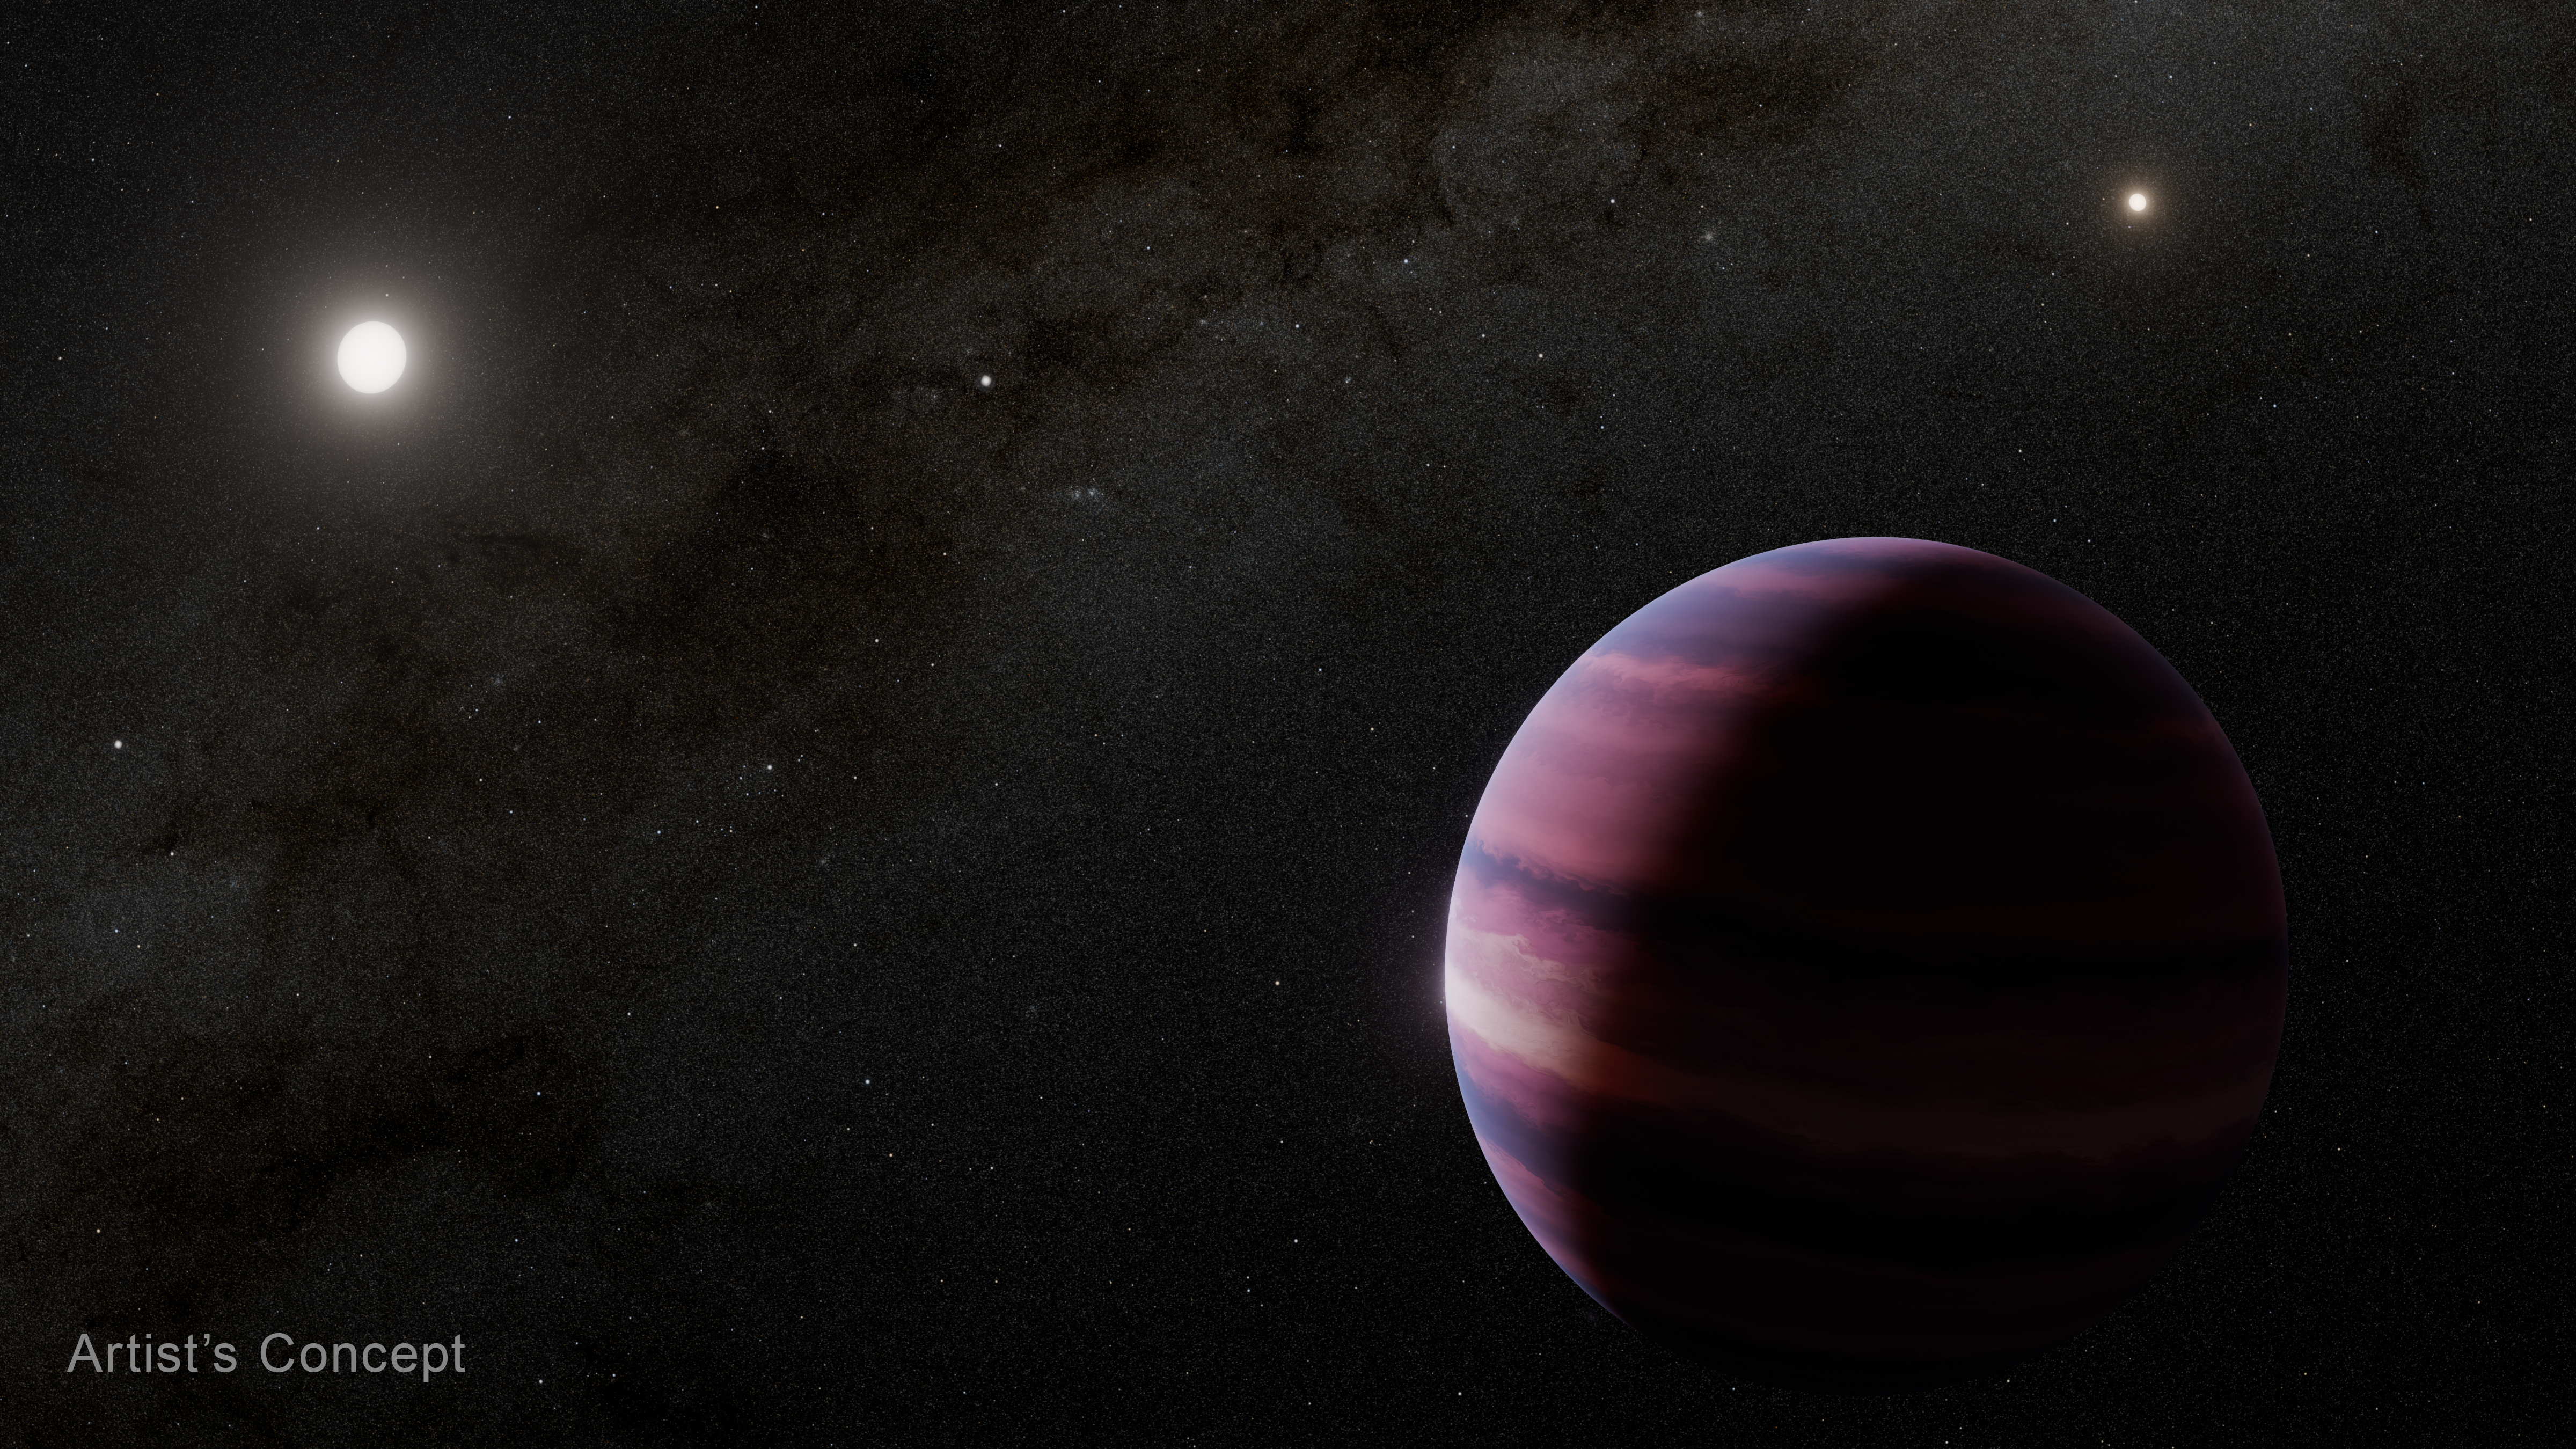

Alpha Centauri A and Planet (Artist’s Concept)

This artist’s concept shows what the gas giant orbiting Alpha Centauri A could look like. Observations of the triple star system Alpha Centauri using the NASA/ESA/CSA James Webb Space Telescope indicate the potential gas giant, about the mass of Saturn, orbiting the star by about two times the distance between the Sun and Earth.

In this concept, Alpha Centauri A is depicted at the upper left of the planet, while the other Sun-like star in the system, Alpha Centauri B, is at the upper right. Our Sun is shown as a small dot of light between those two stars.

Credit: NASA, ESA, CSA, STScI, R. Hurt (Caltech/IPAC)